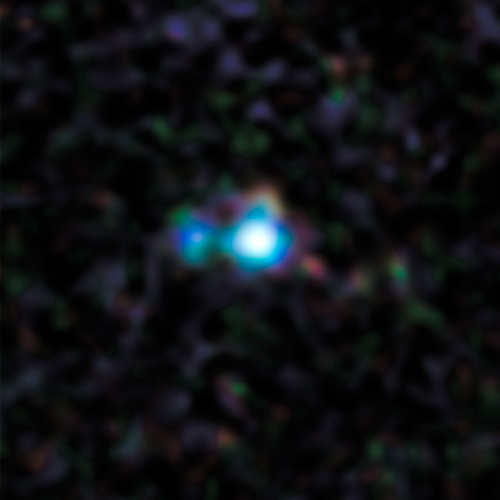

2013 Hubble image of Supernova 2012Z

This image shows Supernova 2012Z, found in the outskirts of the spiral galaxy NGC 1309.

The stellar blast is a member of a unique class of supernova called Type Iax. These supernovae are less energetic, and hence fainter on average, than their well-known cousins Type Ia supernovae, which also originate from exploding white dwarfs in binary systems.

The location of the supernova in the galaxy is highlighted in the annotated image.

Credit: NASA, ESA, C. McCully and S. Jha (Rutgers University), R. Foley (University Illinois), and Z. Levay (STScI) Acknowledgment: Hubble Heritage Team (STScI/AURA), and A. Riess (JHU/STScI)